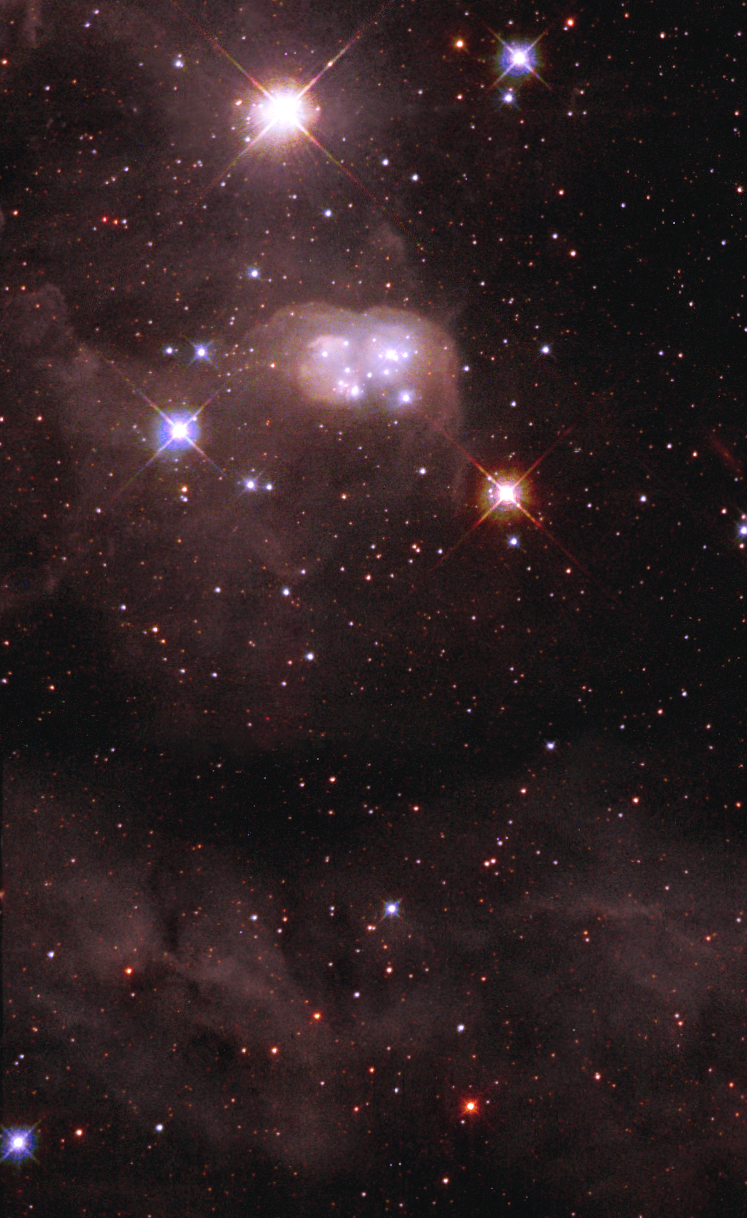

'Double Bubble' in Neighboring Galaxy

A unique peanut-shaped cocoon of dust, called a reflection nebula, surrounds a cluster of young, hot stars in this view from the NASA/ESA Hubble Space Telescope. The 'double bubble, ' called N30B, is inside a larger nebula, named DEM L 106. The larger nebula is embedded in the Large Magellanic Cloud, a satellite galaxy of our Milky Way located 160, 000 light-years away. The wispy filaments of DEM L 106 fill much of the image.

Credit: NASA/ESA and The Hubble Heritage Team (STScI/AURA)